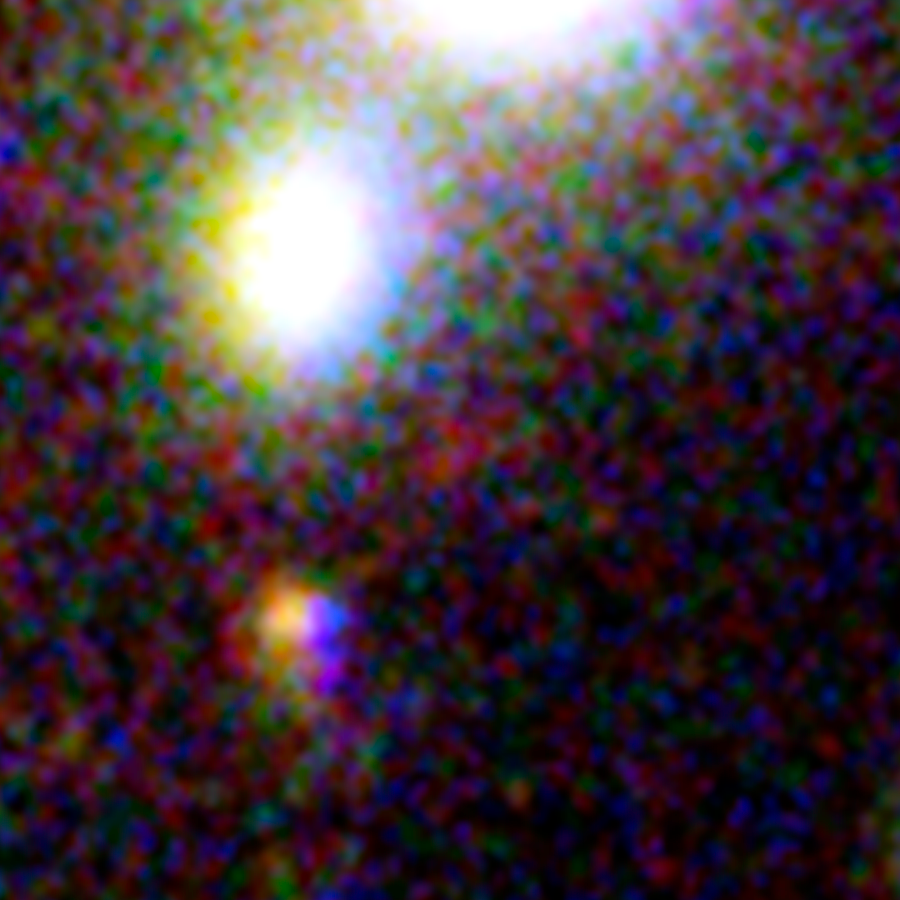

One of three magnified images of a distant galaxy (3)

This image, taken with the NASA/ESA Hubble Space Telescope, shows one of three images of the same very distant galaxy whose light has taken 13 billion years to reach us. The galaxy has been magnified and multiply imaged by the lensing effect of the galaxy cluster Abell 2744.

By measuring the angular separations between the three magnified images of the galaxy a team of astronomers were able to further constrain their measurement of the galaxy’s distance from Earth. Much like using your camera to focus on an object, and then reading its distance from you on the lens focus ring.

This makes this possibly the most reliable distance measurement yet of an object that existed in the Universe’s formative years.

Credit: NASA, ESA Acknowledgement: A. Zitrin (California Institute of Technology, USA)